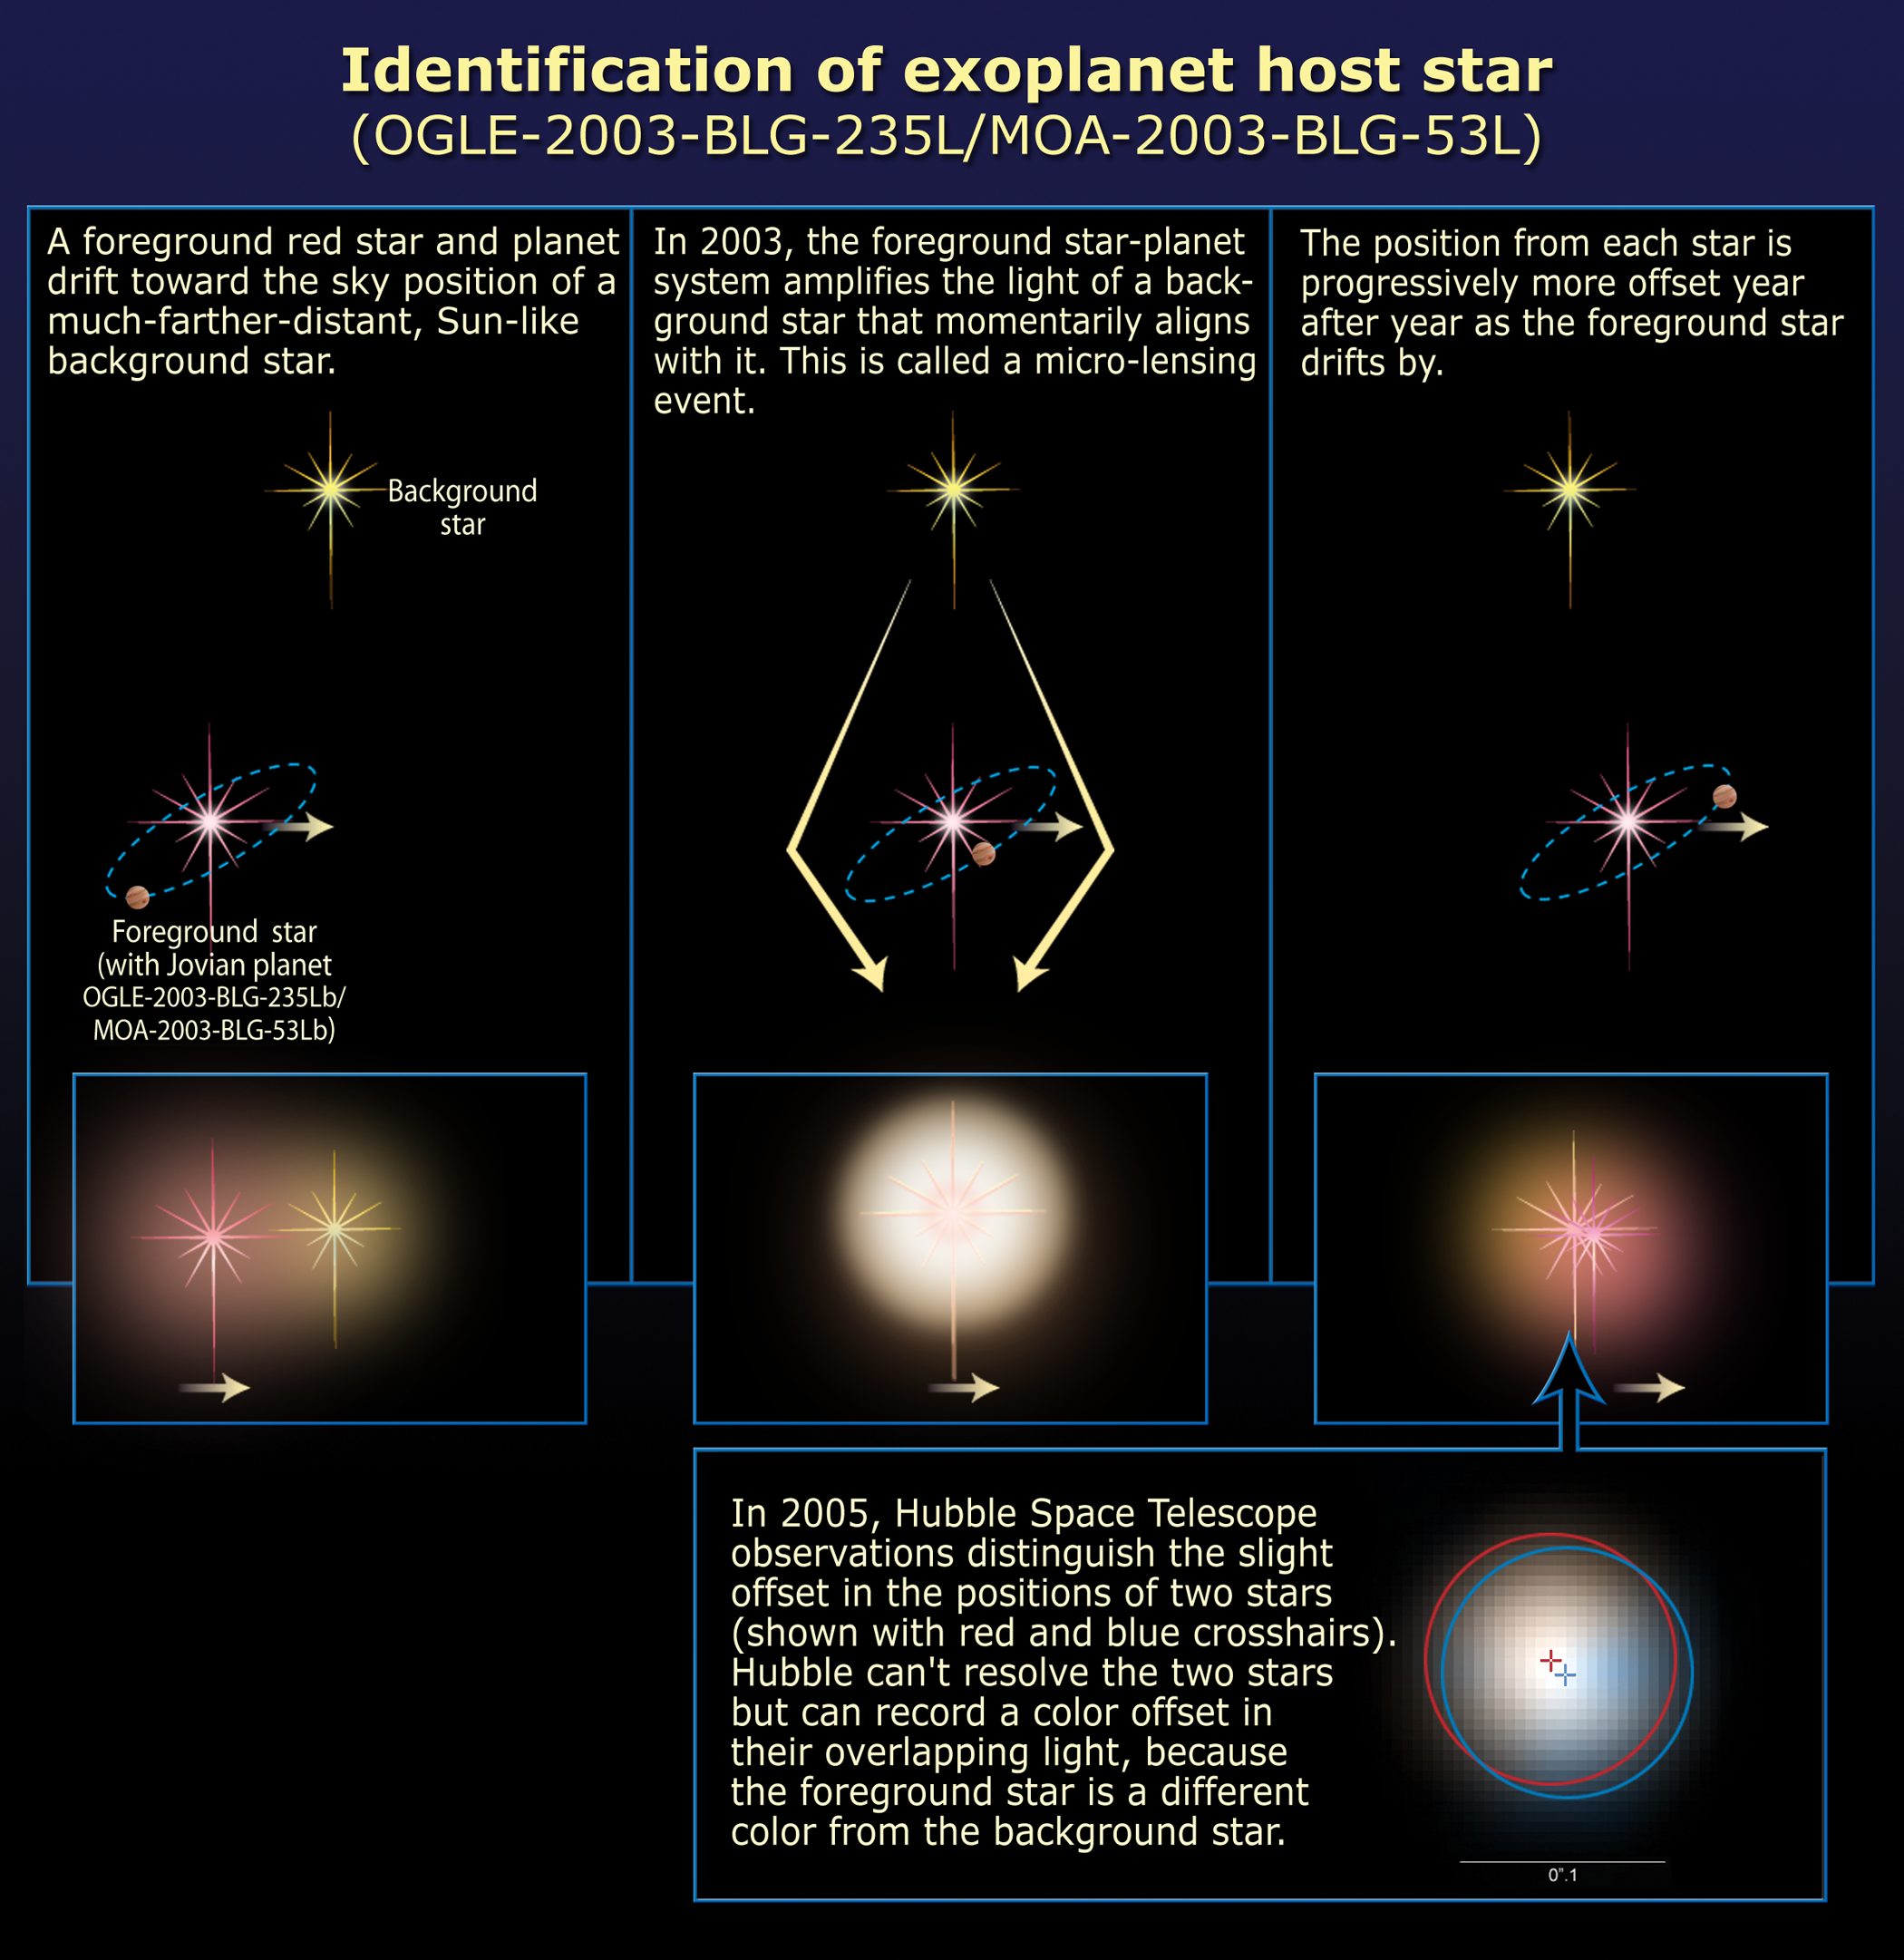

Identification of extrasolar planet host star

[bottom left text]
Hubble Space telescope observed and identified the host star to a gravitationally lensed planet first discovered in 2003 by ground-based telescopes.

[left box]
A foreground red star and planet drifts toward the sky position of a much farther sunlike background star.

[middle-boxes]
In 2003, the foreground star-planet system slightly amplifies the light of a background star that momentarily aligns with it. This is called a microlensing event.

[right box]
The light from each star is progressively more offset year after year as the foreground star drifts by.

[bottom right box]
In 2005, Hubble Space Telescope observations distinguished the light from the two stars. This was possible because the foreground star turns out to be a different colour from the background star. By observing the stars though a red and blue filter, astronomers were able to enhance the visibility of the offset. The relative offset is 0.7 milliarcseconds (the angular width of a dime seen 3,000 miles away) from the source star. (This is below Hubble's resolution, but still a measurable effect.) The deduced positions of the two stars in 2005 are shown with red and blue crosshatches.

Credit: NASA, ESA, D. Bennett (University of Notre Dame), and J. Anderson (Rice University)